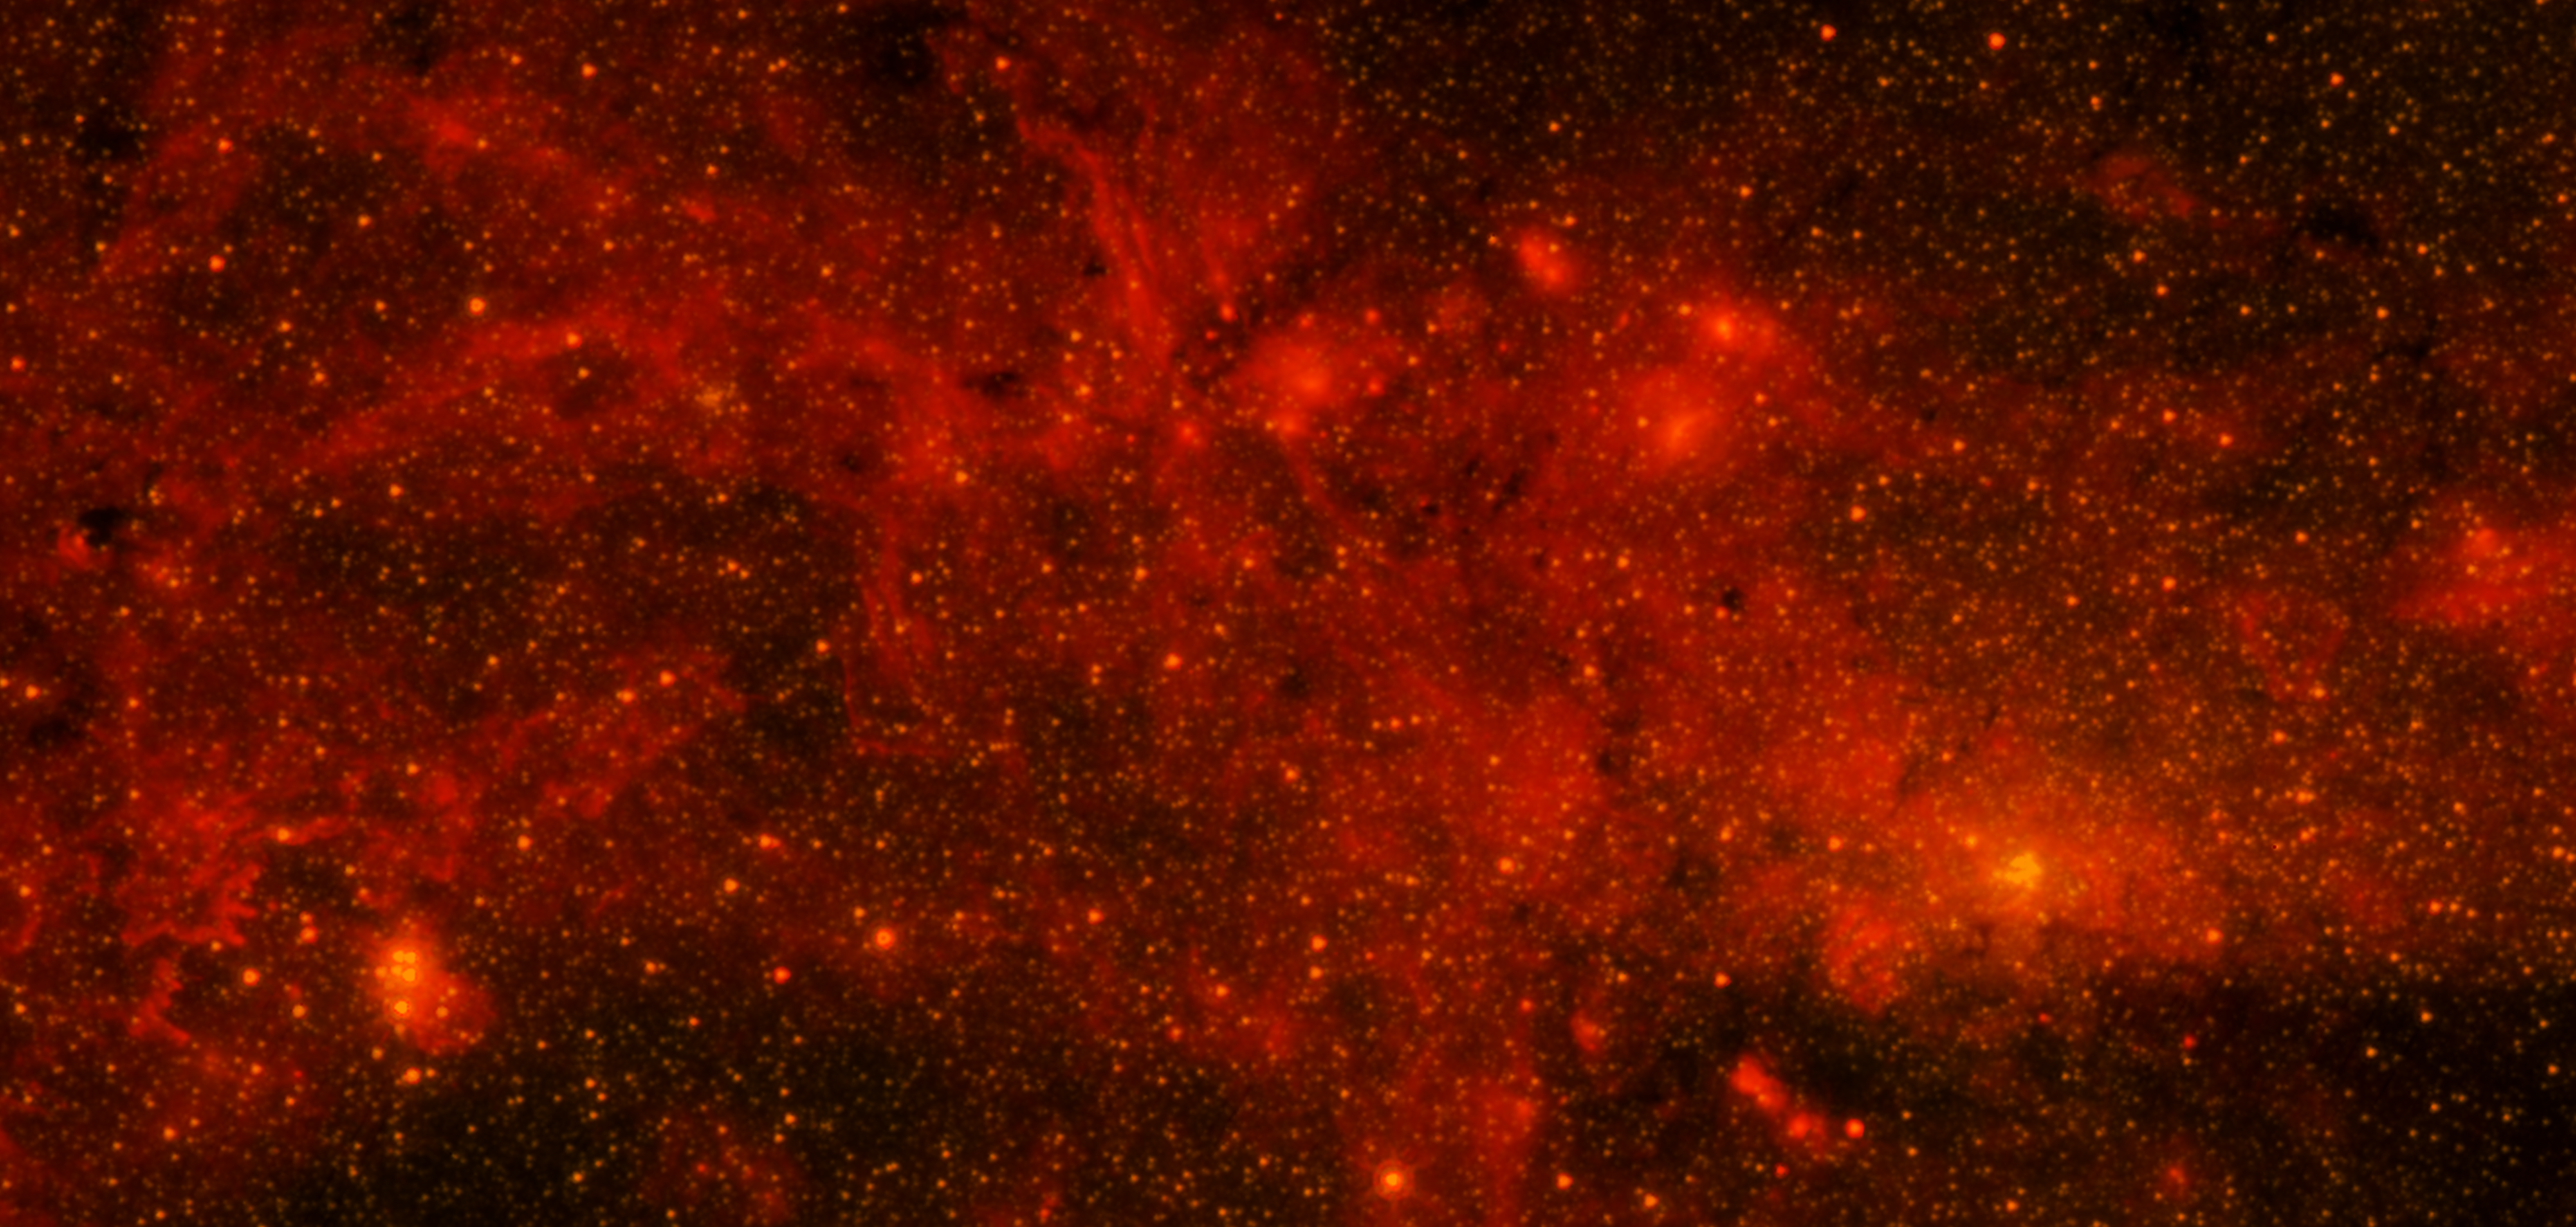

Galactic centre region in infrared from Spitzer

The Spitzer Space Telescope's infrared-light observations provide a detailed and spectacular view of the galactic centre region. The swirling core of our galaxy harbours hundreds of thousands of stars that cannot be seen in visible light. These stars heat the nearby gas and dust. These dusty clouds glow in infrared light and reveal their often dramatic shapes. Some of these clouds harbour stellar nurseries that are forming new generations of stars. Like the downtown of a large city, the centre of our galaxy is a crowded, active and vibrant place.

Credit: NASA, JPL-Caltech, E. Churchwell (University of Wisconsin, USA), SSC and STScI